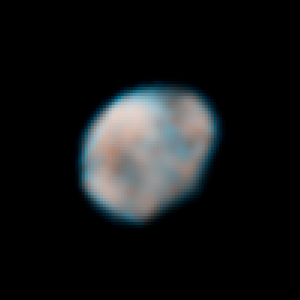

Vesta - May 14, 2007

Hubble observations of Vesta were taken with the Wide Field Planetary Camera 2 on May 14 and 16, 2007.

Credit: NASA, ESA, and L. McFadden (University of Maryland)